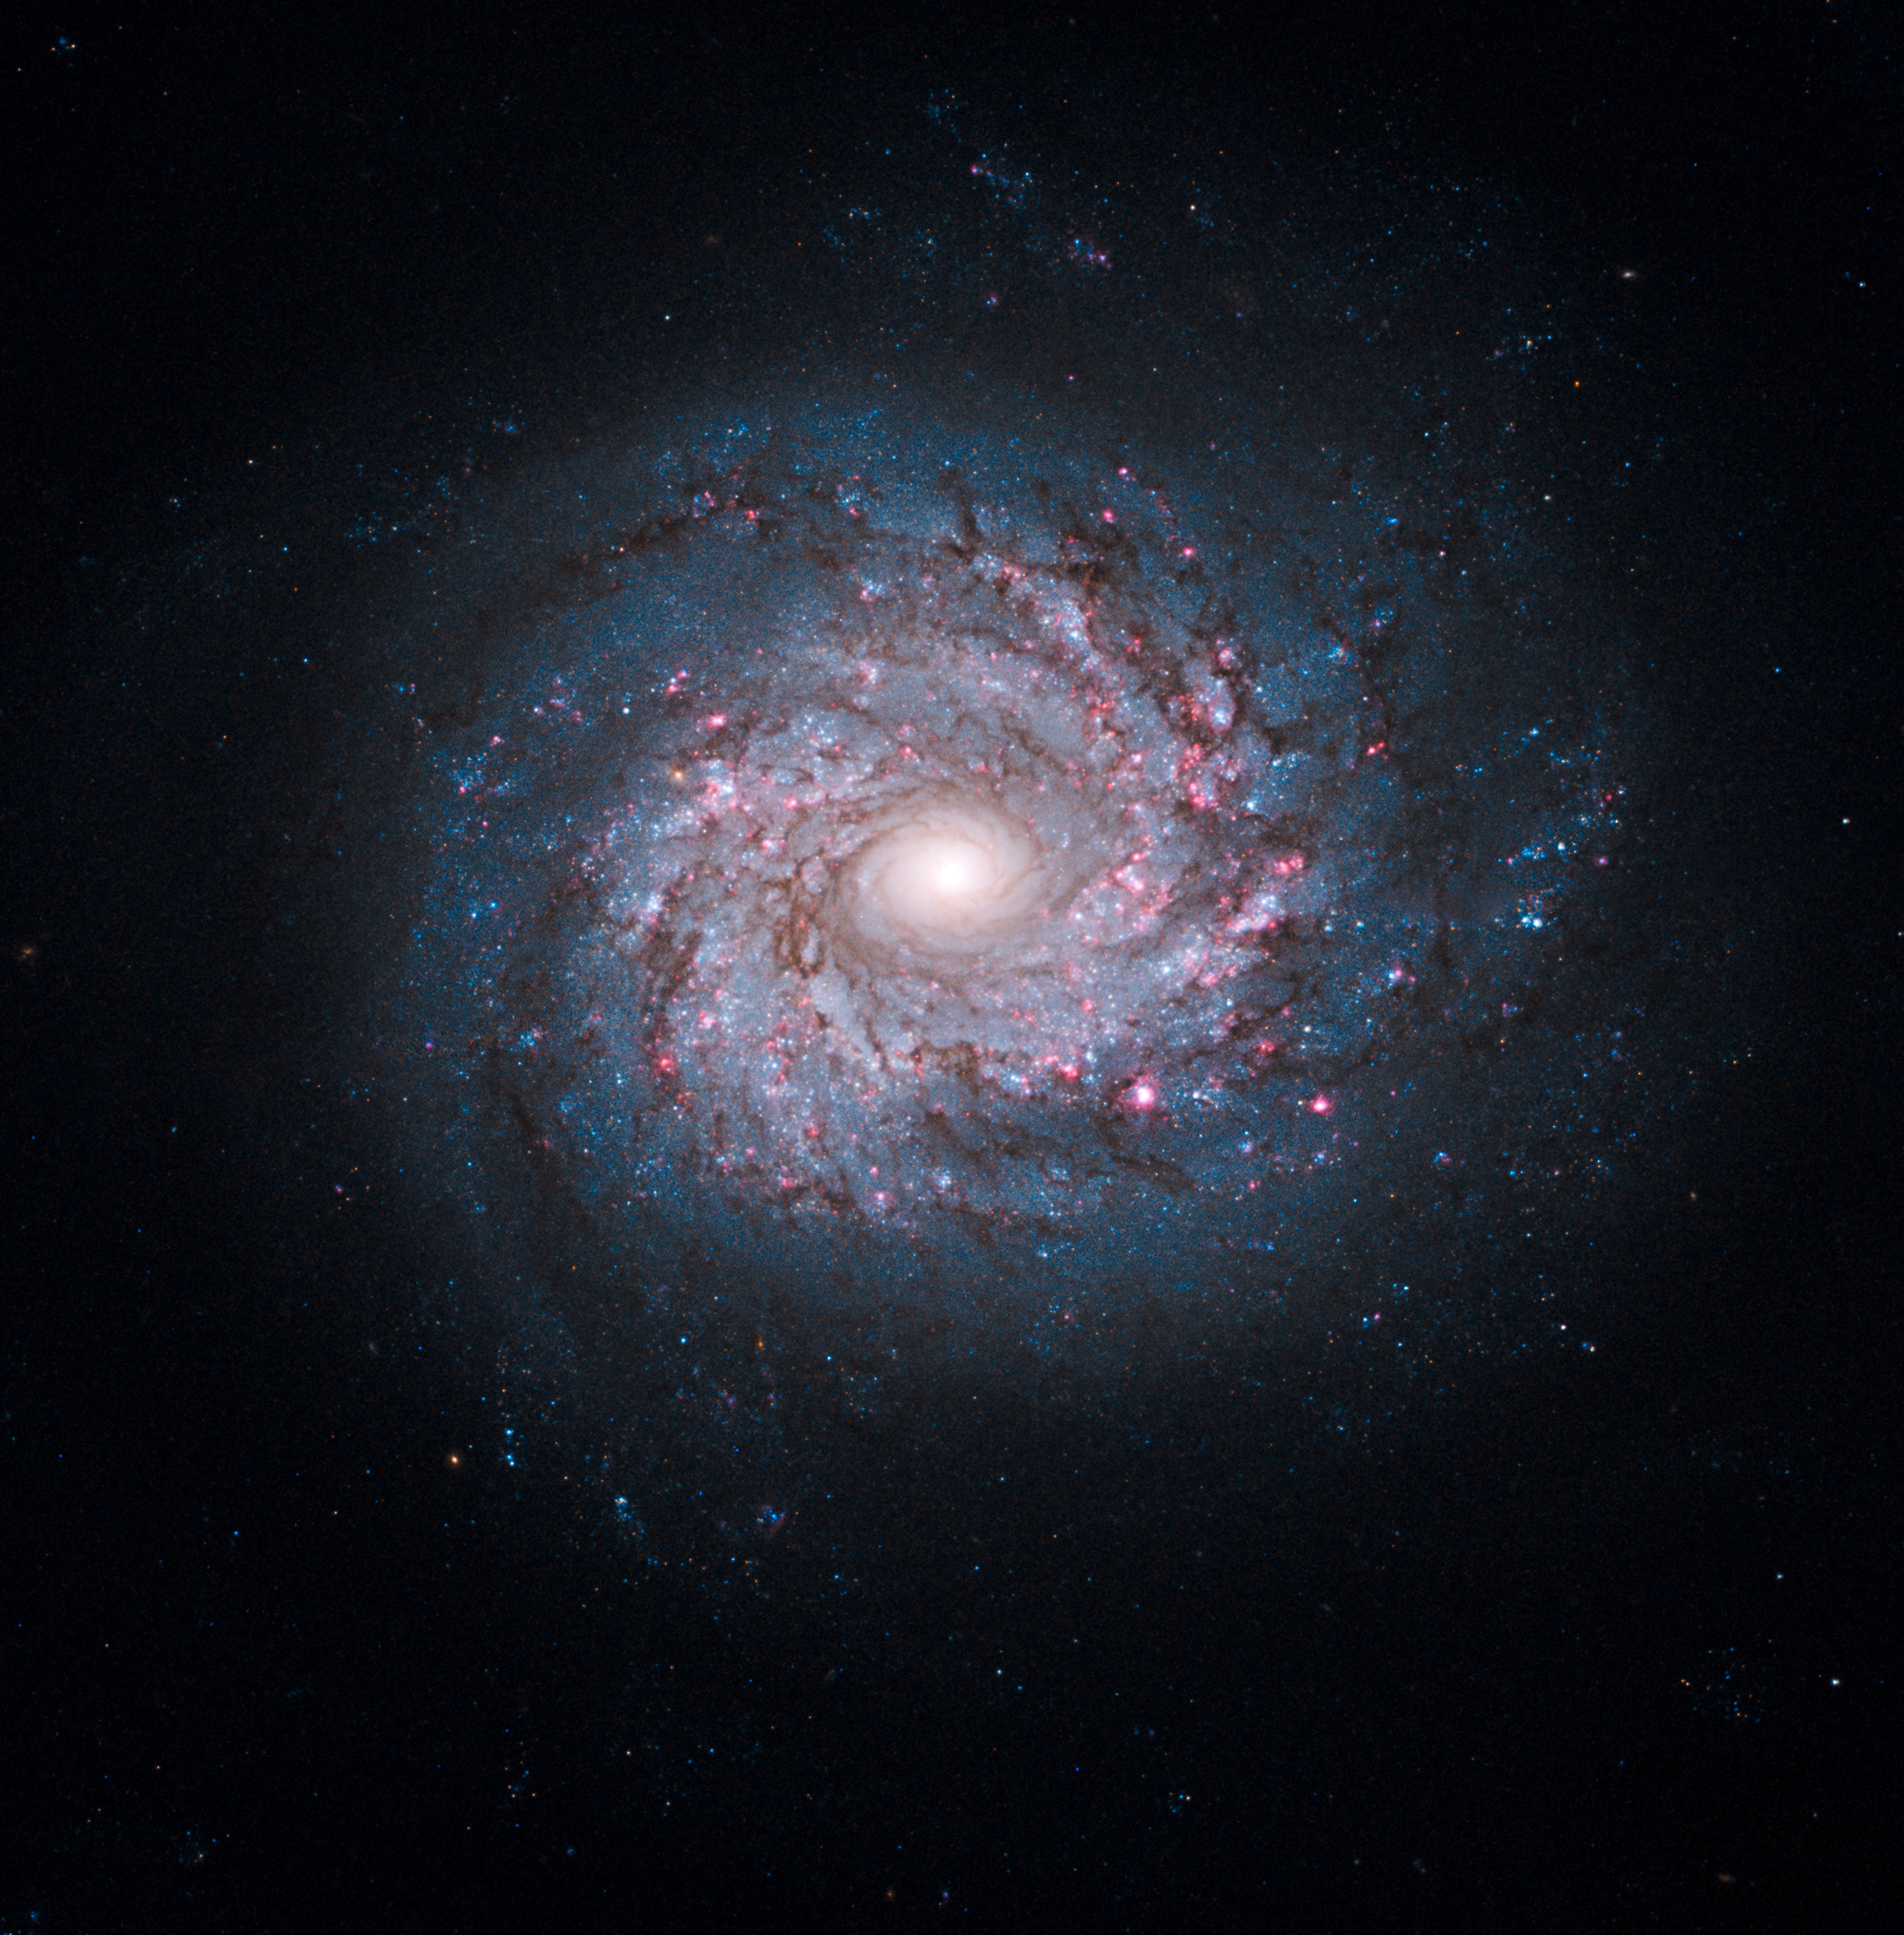

Face-on spiral galaxy NGC 3982

Though the universe is chock full of spiral-shaped galaxies, no two look exactly the same. This face-on spiral galaxy, called NGC 3982, is striking for its rich tapestry of star birth, along with its winding arms. The arms are lined with pink star-forming regions of glowing hydrogen, newborn blue star clusters, and obscuring dust lanes that provide the raw material for future generations of stars. The bright nucleus is home to an older population of stars, which grow ever more densely packed toward the centre.

NGC 3982 is located about 68 million light-years away in the constellation Ursa Major. The galaxy spans about 30,000 light-years, one-third of the size of our Milky Way galaxy. This colour image is composed of exposures taken by the Hubble Space Telescope's Wide Field Planetary Camera 2 (WFPC2), the Advanced Camera for Surveys (ACS), and the Wide Field Camera 3 (WFC3). The observations were taken between March 2000 and August 2009. The rich colour range comes from the fact that the galaxy was photographed invisible and near-infrared light. Also used was a filter that isolates hydrogen emission that emanates from bright star-forming regions dotting the spiral arms.

Credit: NASA, ESA, and the Hubble Heritage Team (STScI/AURA)